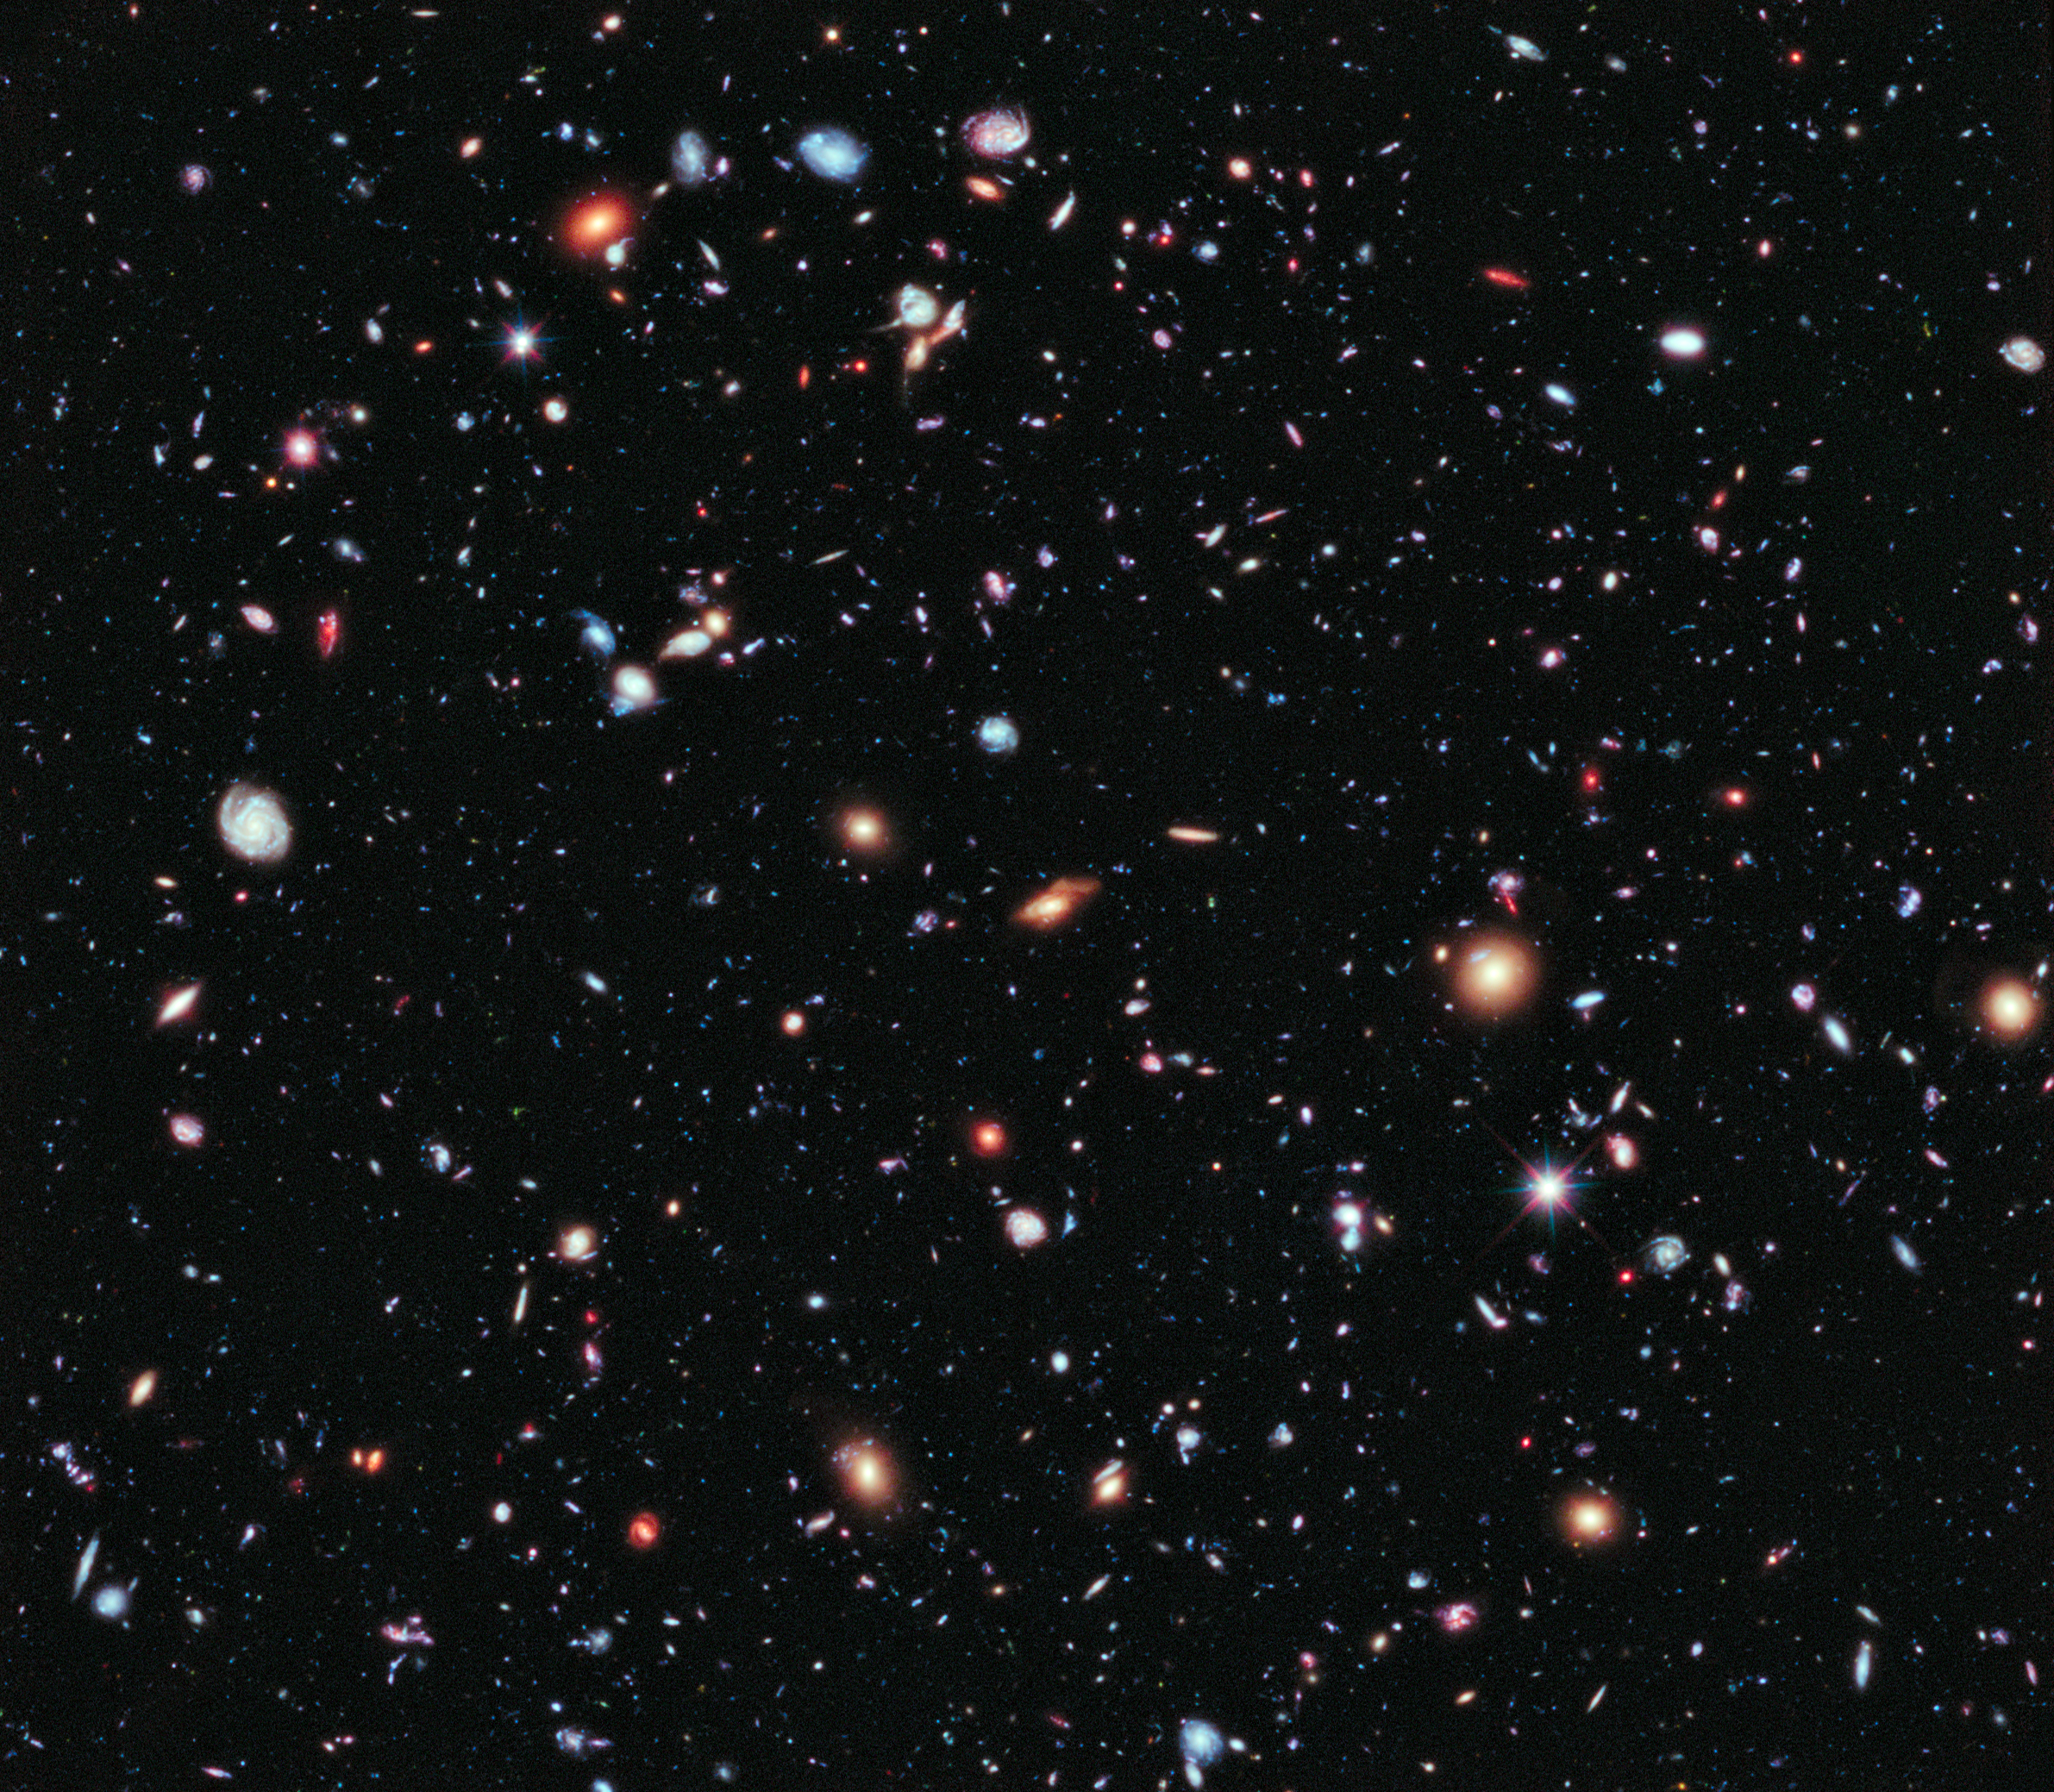

The Hubble eXtreme Deep Field

This image, called the Hubble eXtreme Deep Field (XDF), combines Hubble observations taken over the past decade of a small patch of sky in the constellation of Fornax. With a total of over two million seconds of exposure time, it is the deepest image of the Universe ever made, combining data from previous images including the Hubble Ultra Deep Field (taken in 2002 and 2003) and Hubble Ultra Deep Field Infrared (2009).

The image covers an area less than a tenth of the width of the full Moon, making it just a 30 millionth of the whole sky. Yet even in this tiny fraction of the sky, the long exposure reveals about 5500 galaxies, some of them so distant that we see them when the Universe was less than 5% of its current age.

The Hubble eXtreme Deep Field image contains several of the most distant objects ever identified.

Credit: NASA, ESA, G. Illingworth, D. Magee, and P. Oesch (University of California, Santa Cruz), R. Bouwens (Leiden University), and the HUDF09 Team